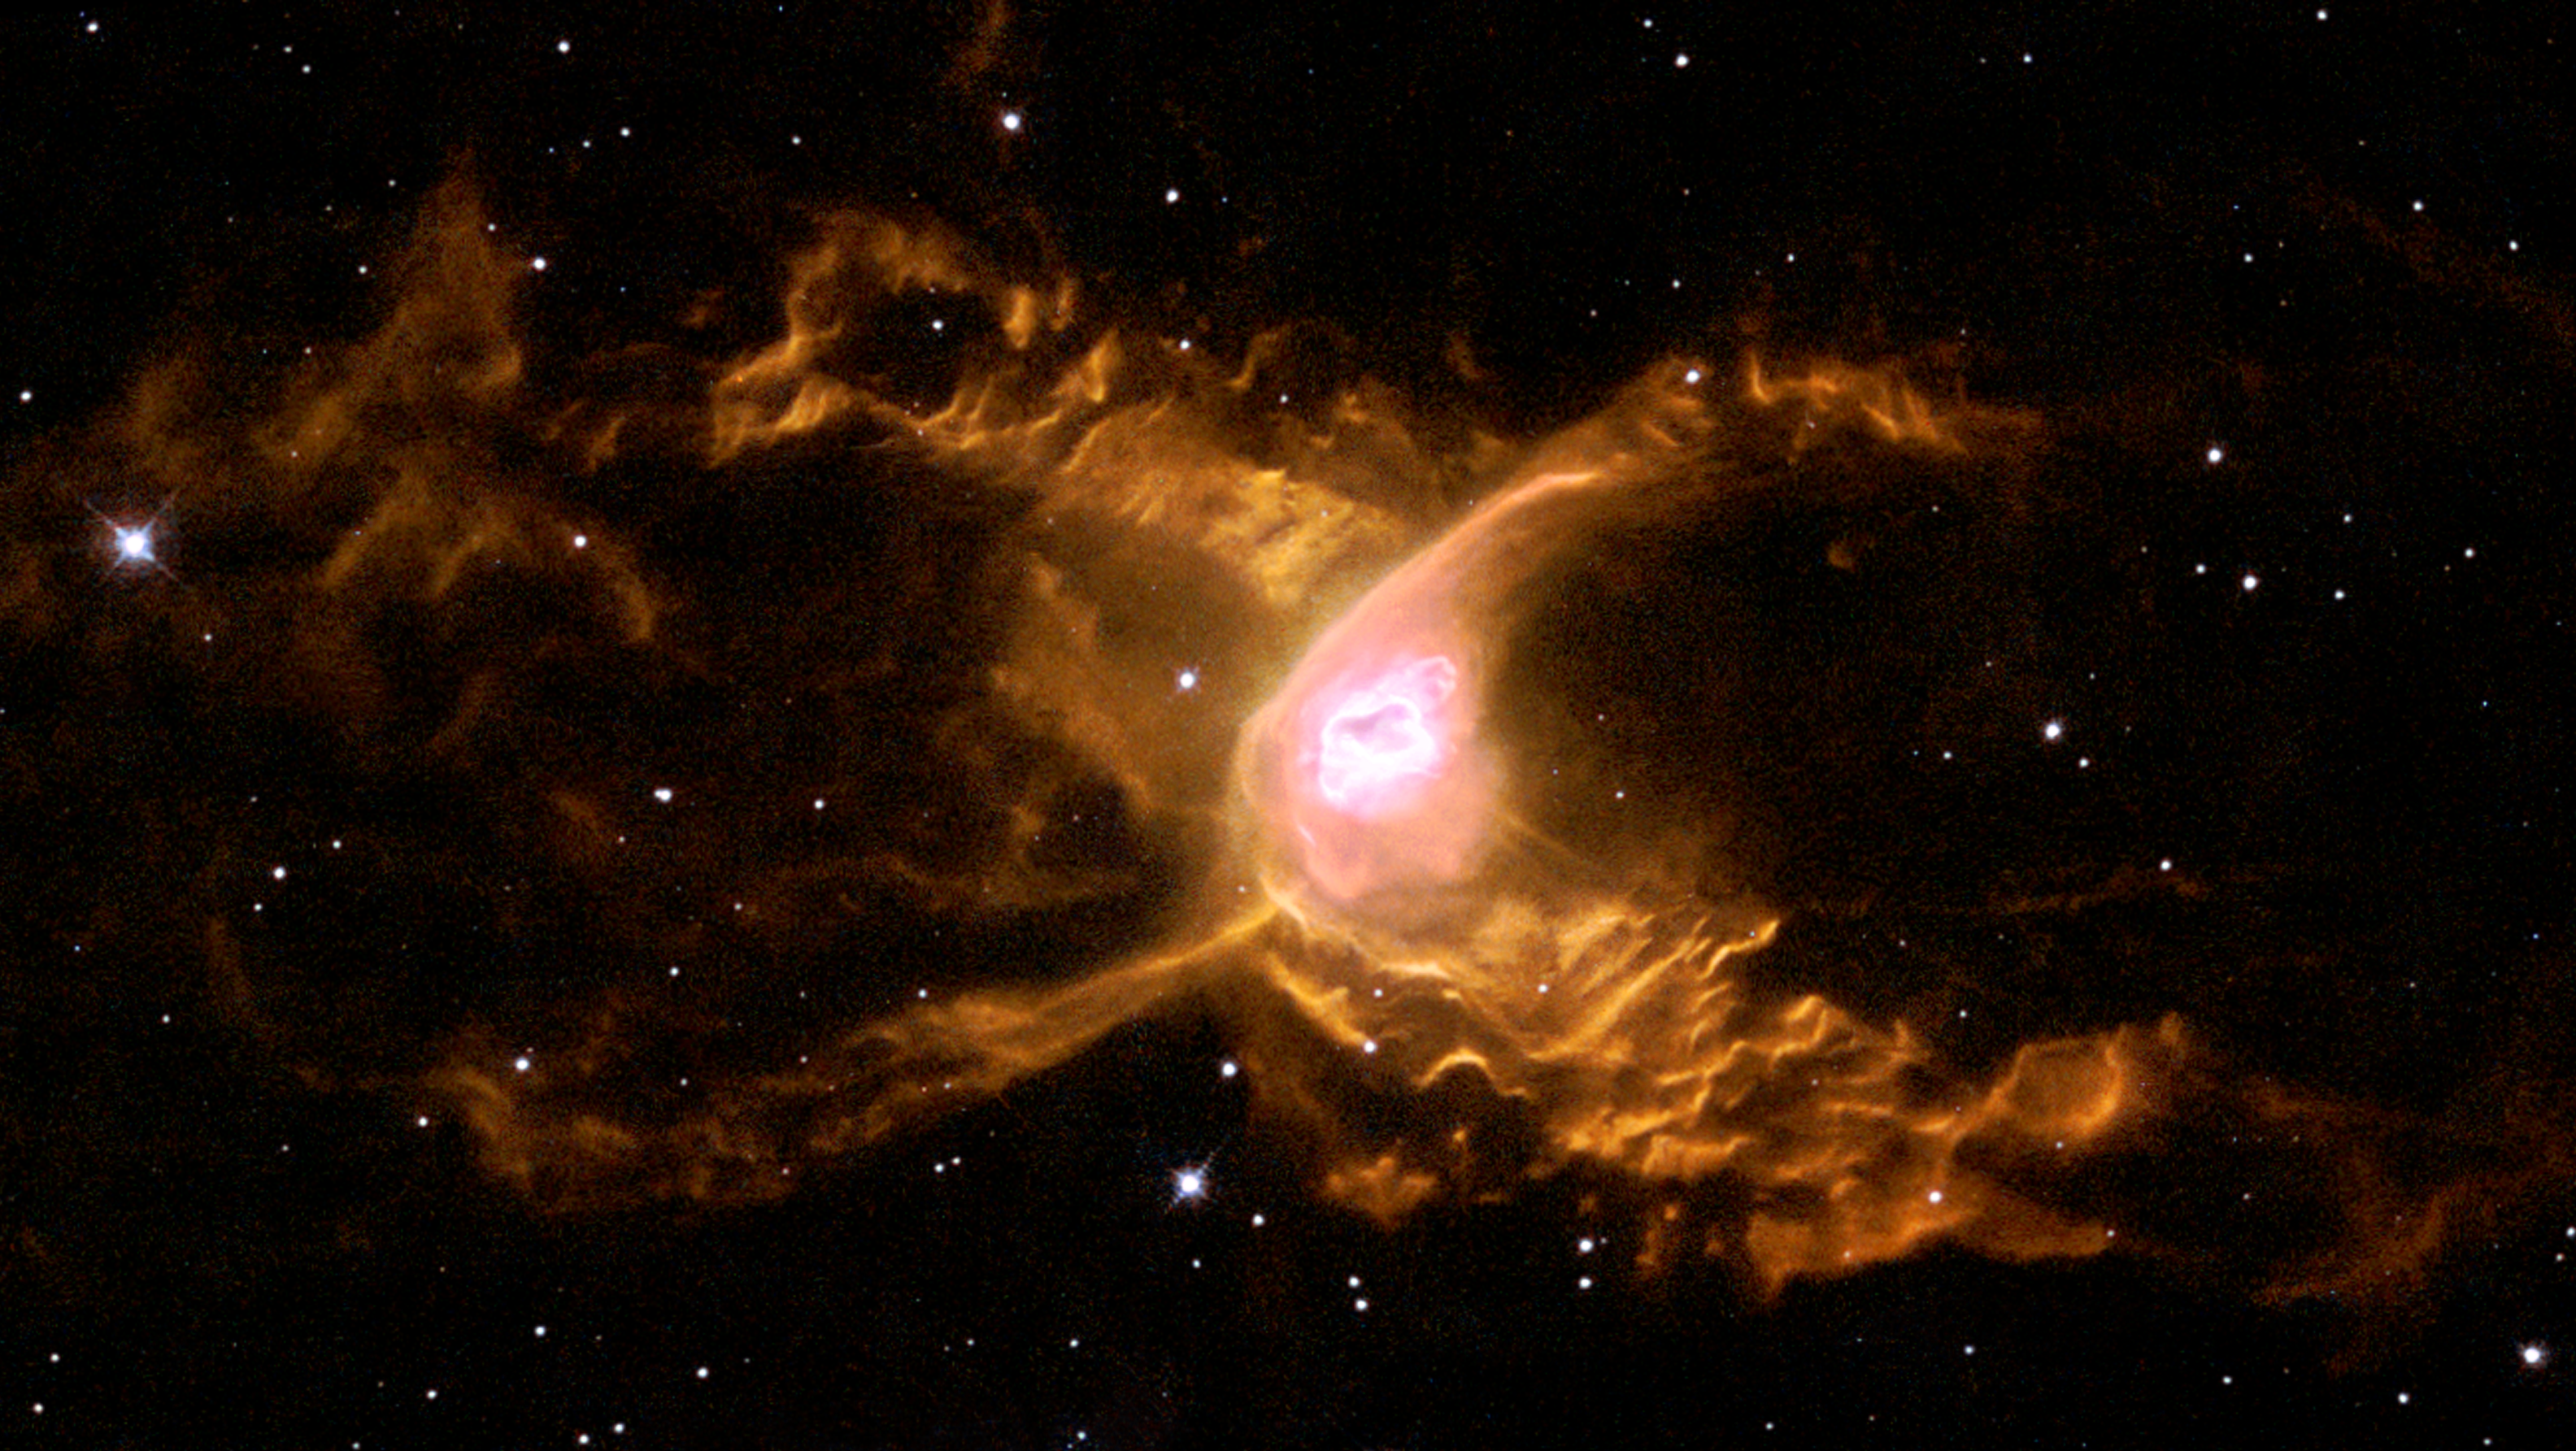

Red Spider Nebula NGC 6537 (Hubble’s view)

The subject of this month’s ESA/Webb Picture of the Month is NGC 6537, a planetary nebula commonly called the Red Spider Nebula.

The nebula got its name from its reddish colour and distinctive shape, which resembles the narrow body of a spider with four outstretched ‘legs’. This image gives the NASA/ESA Hubble Space Telescope’s view of the nebula, using observations made in 1997.

Along each of the Red Spider’s ‘legs’ are billowing clouds of gas, which are captured in great detail by Hubble. Each of the wave-like features is estimated to be 100 billion kilometres high, providing evidence for a clash between the gas that surrounds the nebula and its fierce outflowing winds, which scream into space at thousands of kilometres per second.

These winds are powered by the central star of the nebula, which is seen faintly in optical images like this one. The central star was once an ordinary star, but it has evolved into a bare, searingly hot stellar core that has cast off its outer layers to form the nebula.

Credit: ESA/Hubble & NASA, G. Mellema (Leiden University, the Netherlands)